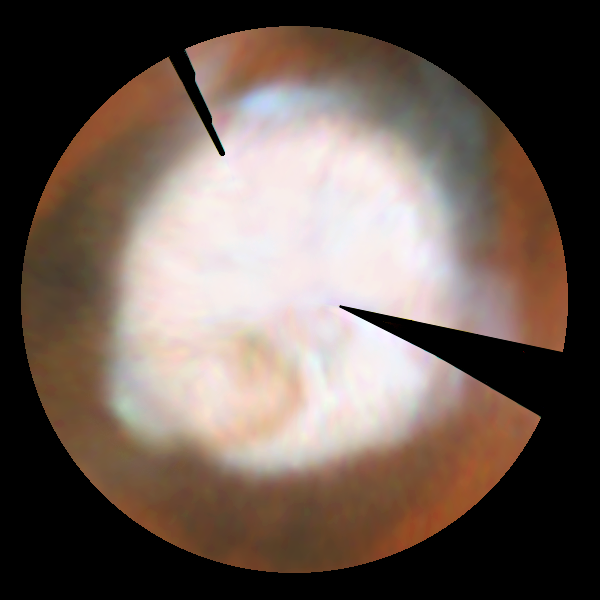

Seasonal Changes In Mars' North Polar Ice Cap

This first mosaic is a view which could not actually be seen in nature because at this season a portion of the pole would have actually been in shadow; the last view, taken near the summer solstice, would correspond to the Midnight Sun on Earth with the pole fully illuminated all day. The resulting polar maps begin at 50 degrees N latitude and are oriented with 0 degrees longitude at the 12 o'clock position. This series of pictures captures the seasonal retreat of Mars' north polar cap.

Credit: Phil James (Univ. Toledo), Todd Clancy (Space Science Inst., Boulder, CO), Steve Lee (Univ. Colorado), and NASA/ESA